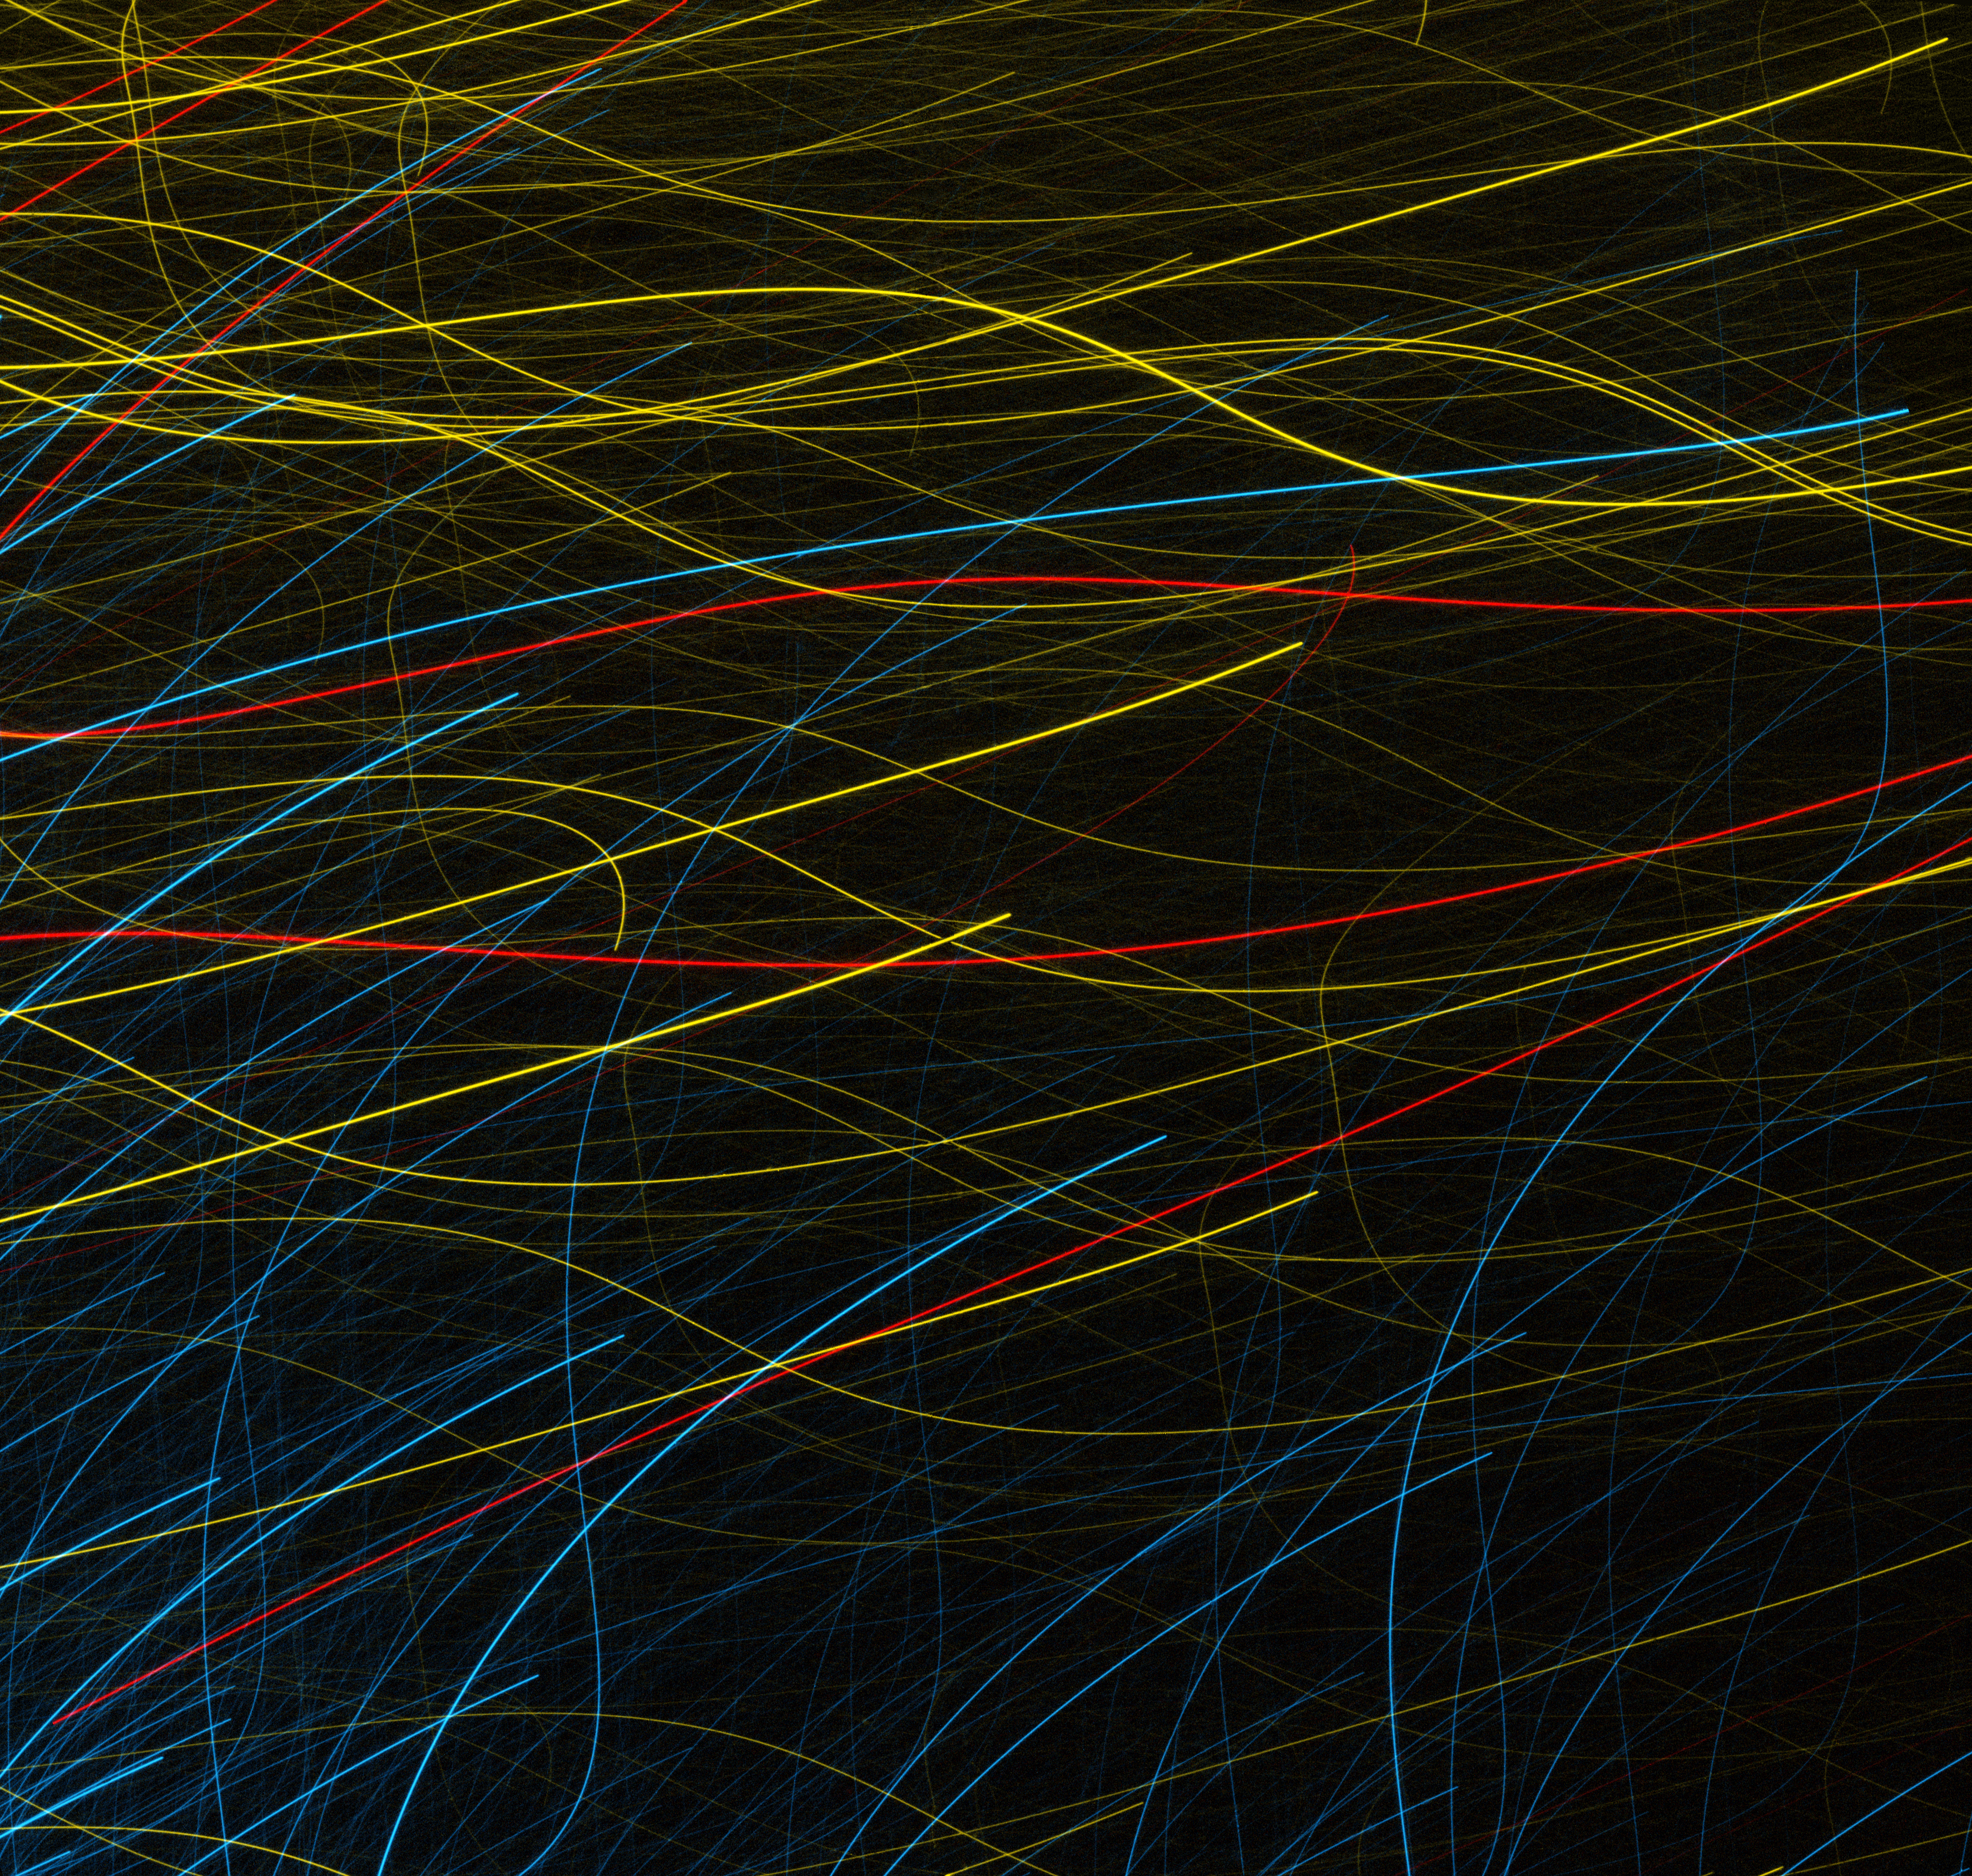

Hubble’s modern art

A piece of art? A time-lapse photo? A flickering light show?

At first glance, this image looks nothing like the images that we are used to seeing from Hubble.

The distinctive splashes of colour must surely be a piece of modern art, or an example of the photographic technique of "light painting". Or, could they be the trademark tracks of electrically charged particles in a bubble chamber? On a space theme, how about a time-lapse of the paths of orbiting satellites?

The answer? None of the above. In fact, this is a genuine frame that Hubble relayed back from an observing session.

Hubble uses a Fine Guidance System (FGS) in order to maintain stability whilst performing observations. A set of gyroscopes measures the attitude of the telescope, which is then corrected by a set of reaction wheels. In order to compensate for gyroscopic drift, the FGS locks onto a fixed point in space, which is referred to as a guide star.

It is suspected that in this case, Hubble had locked onto a bad guide star, potentially a double star or binary. This caused an error in the tracking system, resulting in this remarkable picture of brightly coloured stellar streaks. The prominent red streaks are from stars in the globular cluster NGC 288. It seems that even when Hubble makes a mistake, it can still kick-start our imagination.

A version of this image was entered into the Hubble's Hidden Treasures image processing competition by contestant Judy Schmidt.

Credit: NASA, ESA Acknowledgements: A. Sarajedini (University of Florida) and Judy Schmidt.